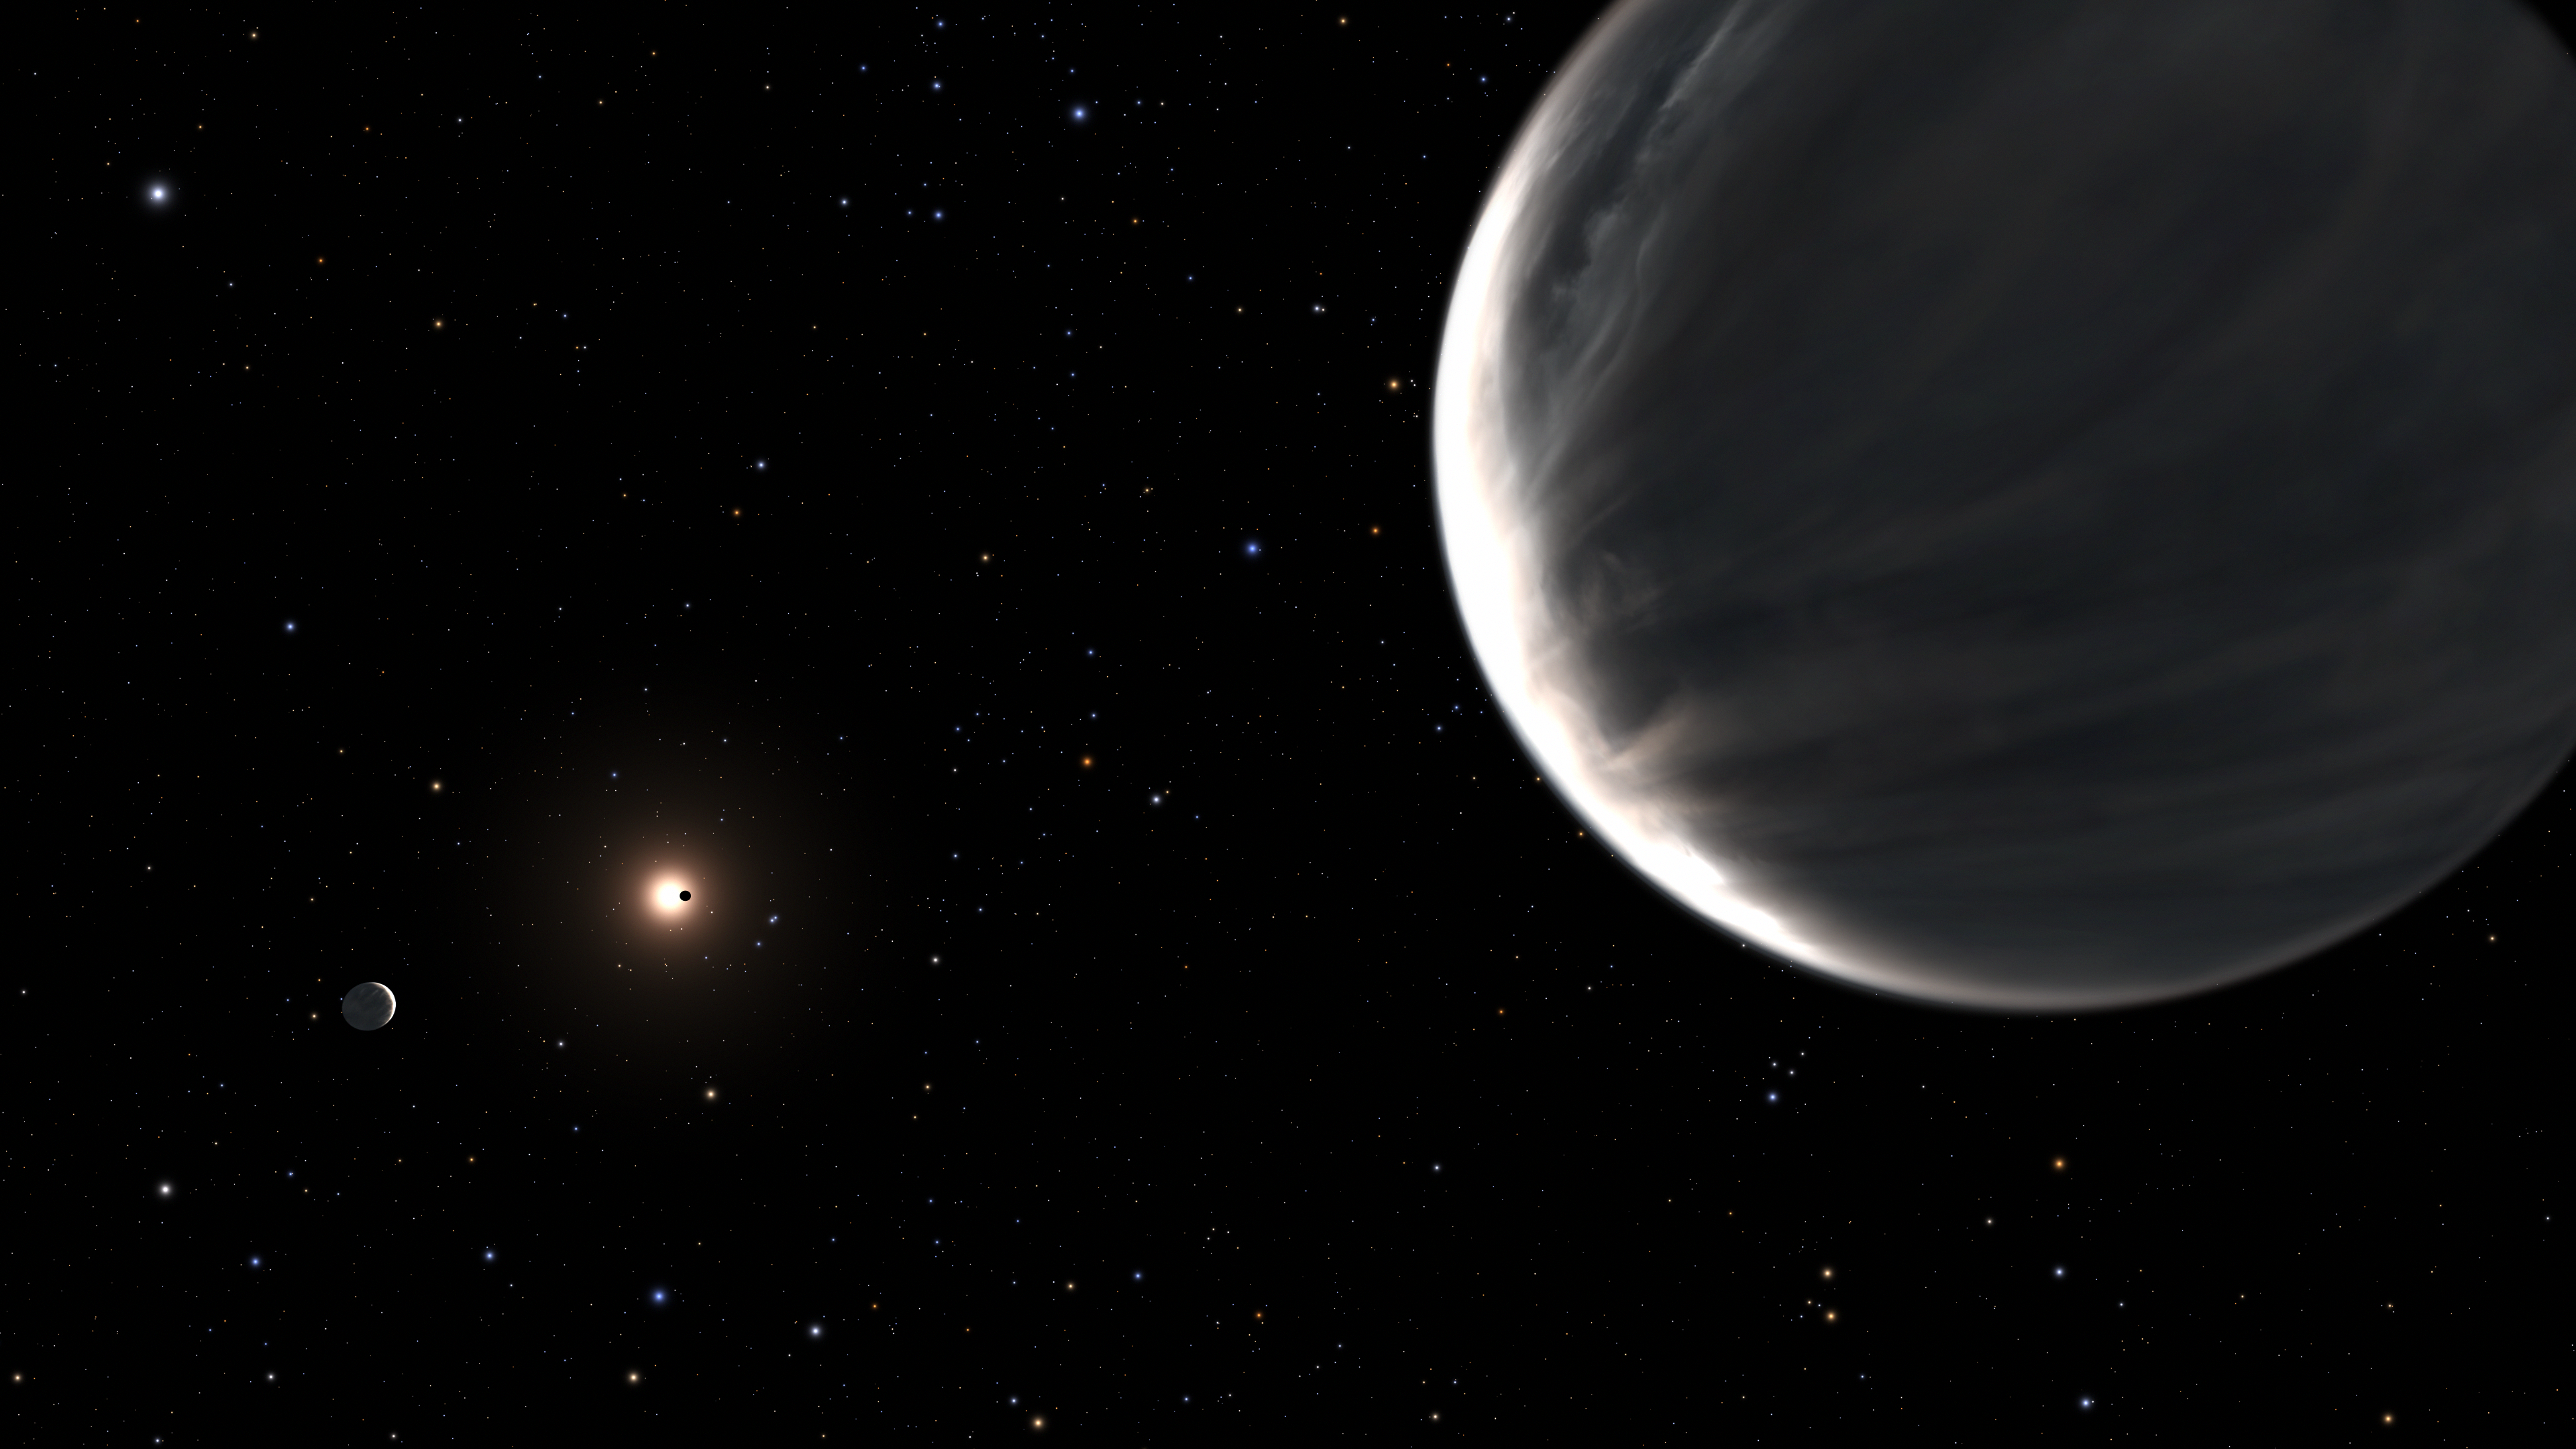

Artist’s Illustration Of Kepler 138 Planetary System

In this illustration the super-Earth, Kepler-138d is in the foreground. To the left, the planet Kepler-138c, and in the background the planet Kepler 138b, seen in silhouette transiting its central star. Kepler 138 is a red dwarf star located 218 light-years away. The low density of Kepler-138c and Kepler-138d — which are nearly identical in size — means that they must be composed largely of water. They are both twice Earth’s mass but have roughly half of Earth’s density, and therefore cannot be solid rock. This is based on measurements of their mass vs. physical diameter. They are considered a new class of “water-planet,” unlike any major planet found in our solar system. Kepler-138 b is one of the smallest exoplanets known, having the mass of the planet Mars and the density of rock.

Credit: NASA, ESA, L. Hustak (STScI)